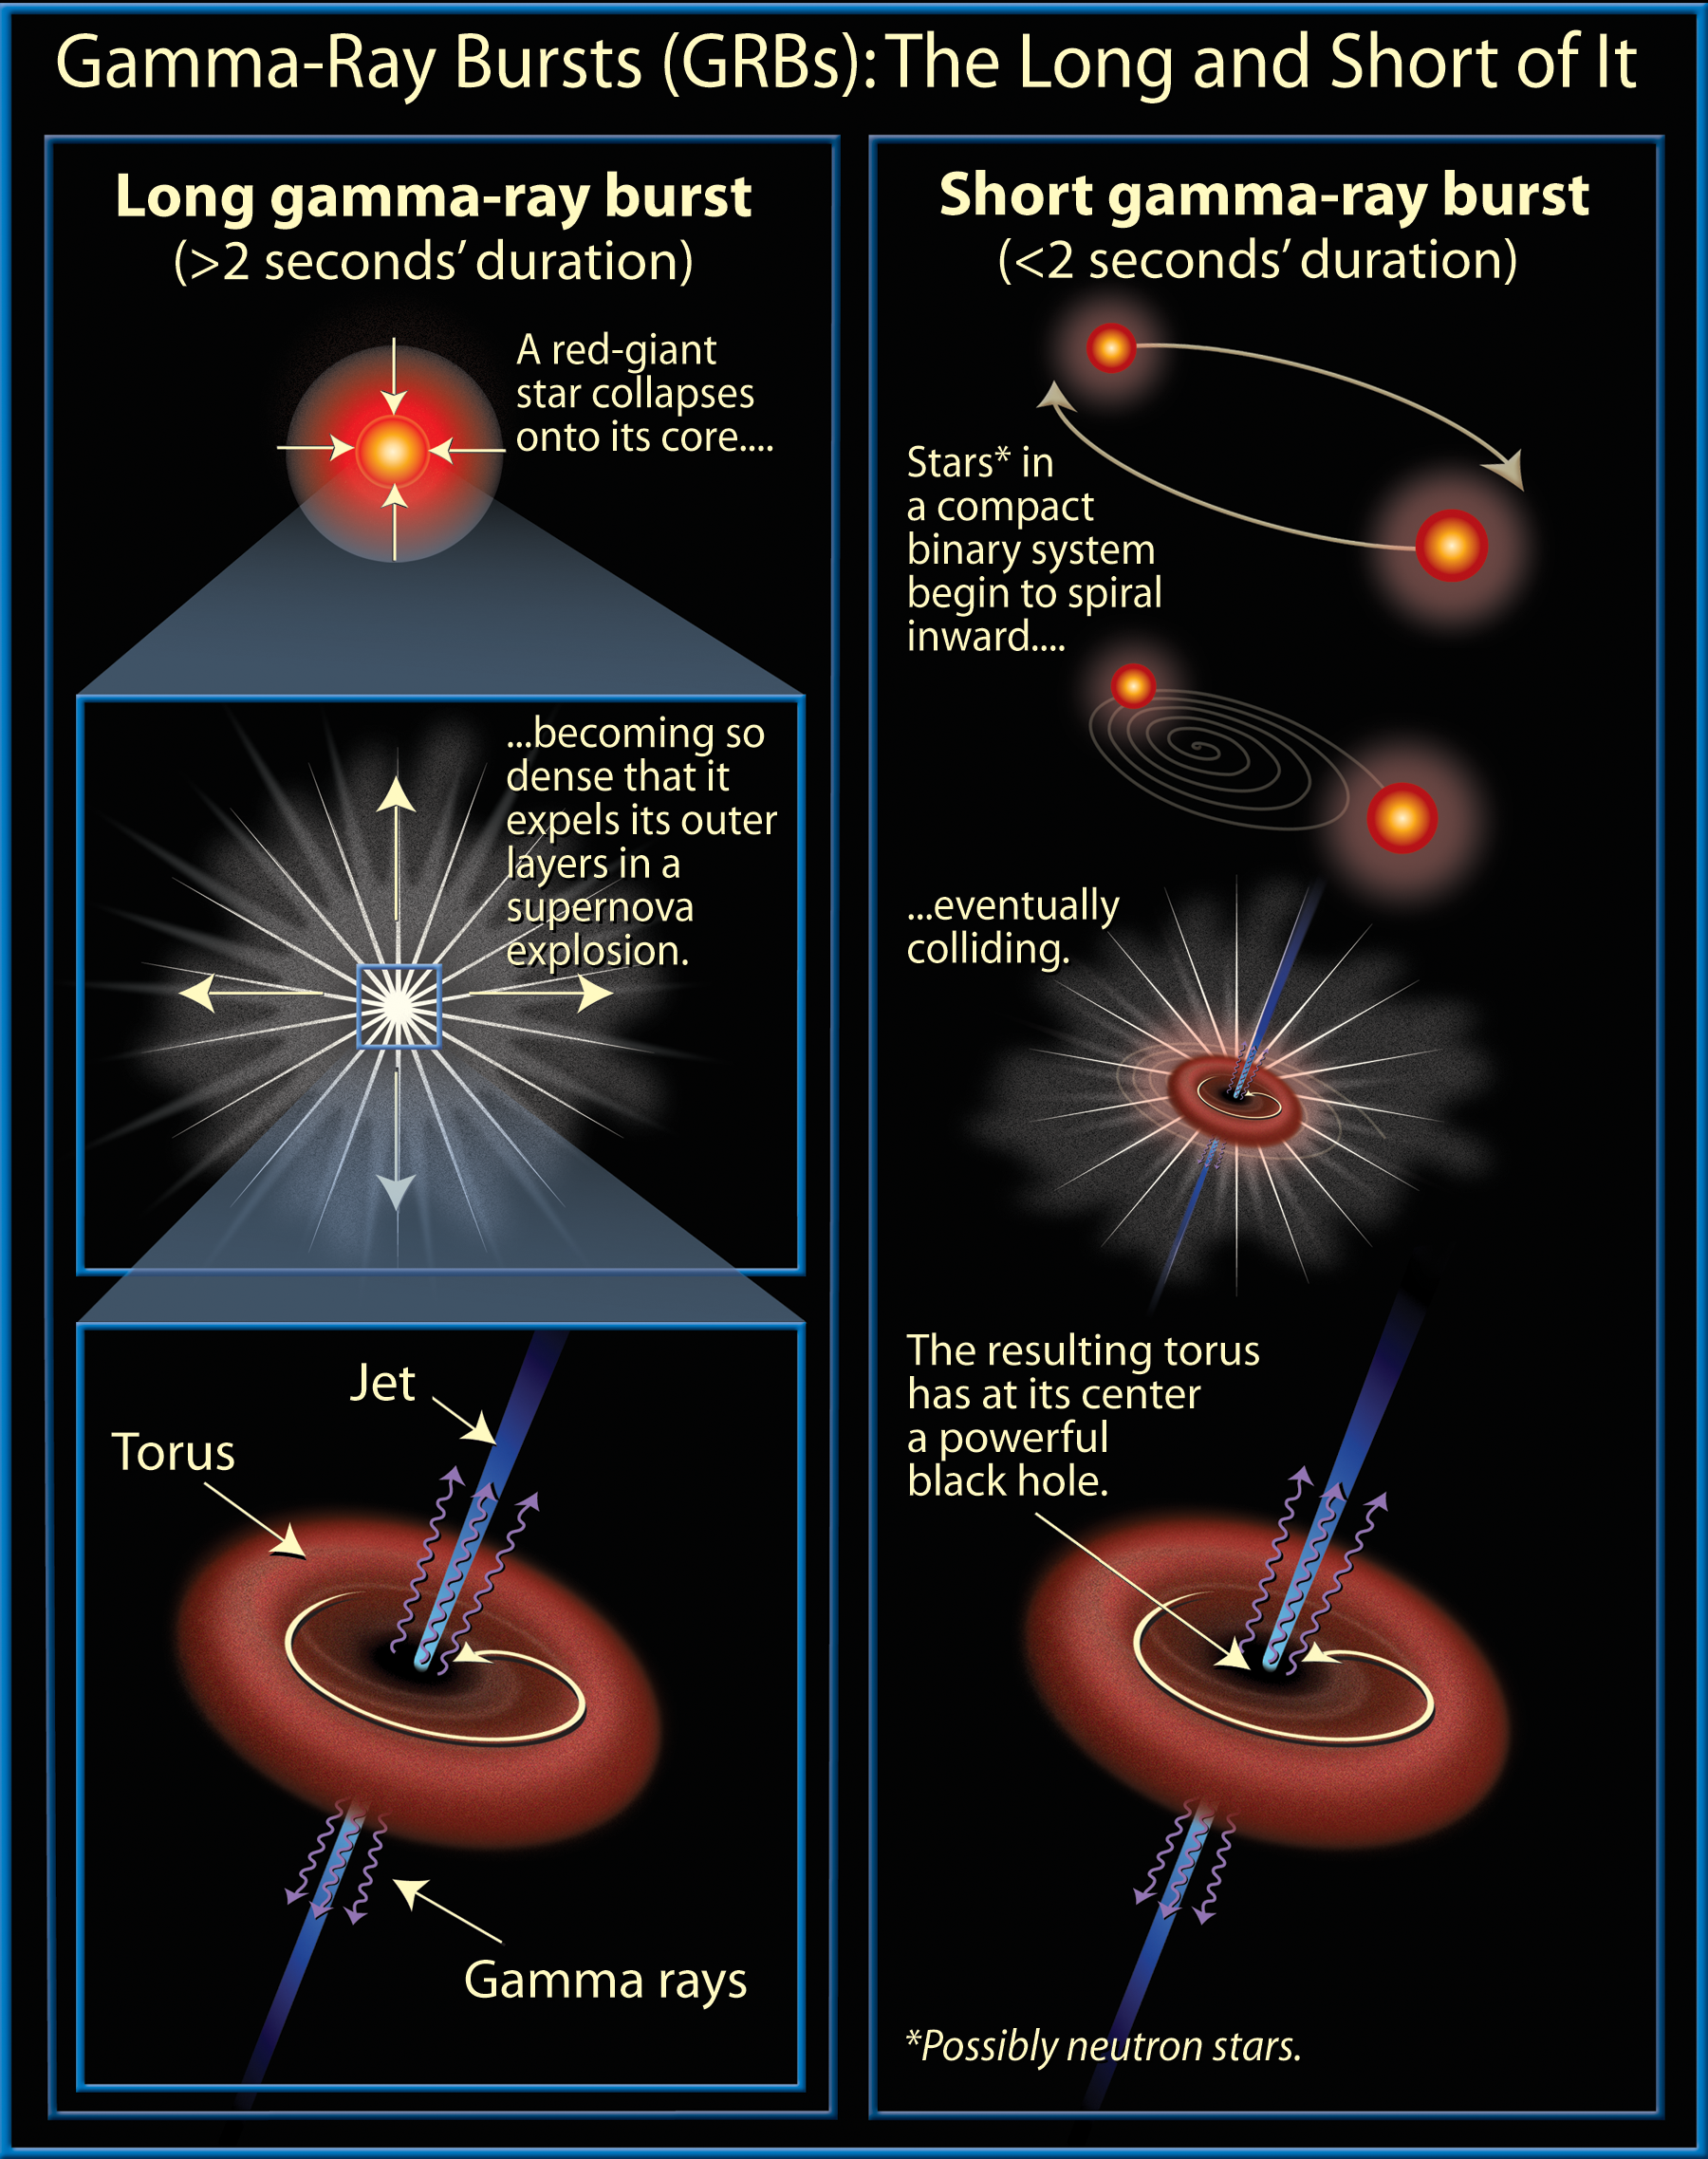

Fast & Slow GRB Models

Long-duration gamma-ray bursts are powerful flashes of high-energy radiation that are sometimes seen coming from certain types of supernovae.

Credit: NASA and A. Feild (STScI)